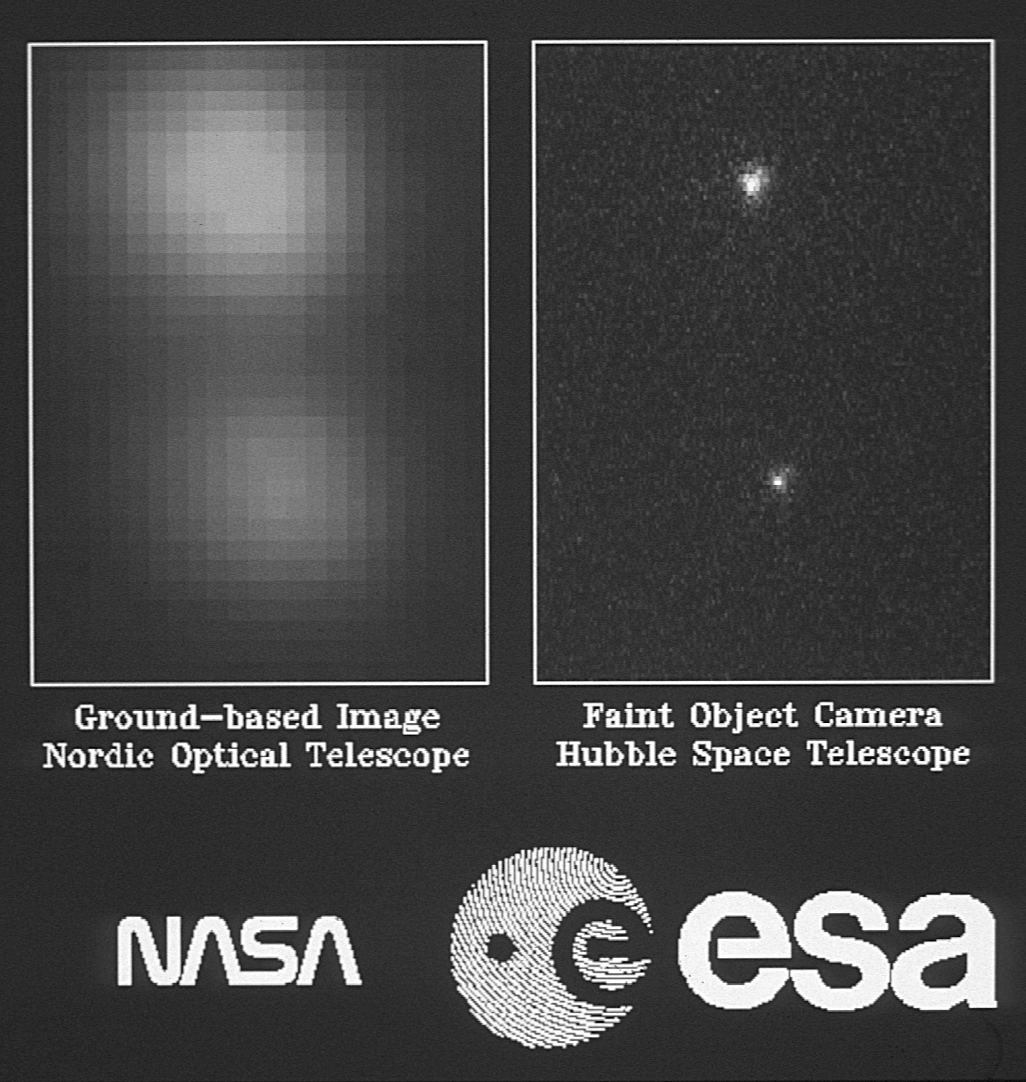

ESA's faint object camera first images

Two views of a small (4.6 by 6.2 arcsecond) star field in the galactic cluster NGC 188 containing two stars separated by 2.9 arcseconds in the sky. Located at a distance of about 5,000 light years, both stars are far too remote for their surfaces to be resolved, and are therefore suitable point sources for evaluating optical imaging quality.

The ground-based image on the left was obtained with the 2.5 meter Nordic Optical Telescope at the Observatorio del Roque de los Muchachos on the island of La Palma. At the time this exposure was taken the atmospheric conditions were such that the stellar images were blurred to an apparent diameter of 1.9 arcseconds - somewhat poorer than typically found at this excellent site.

Credit: ESA and NASA